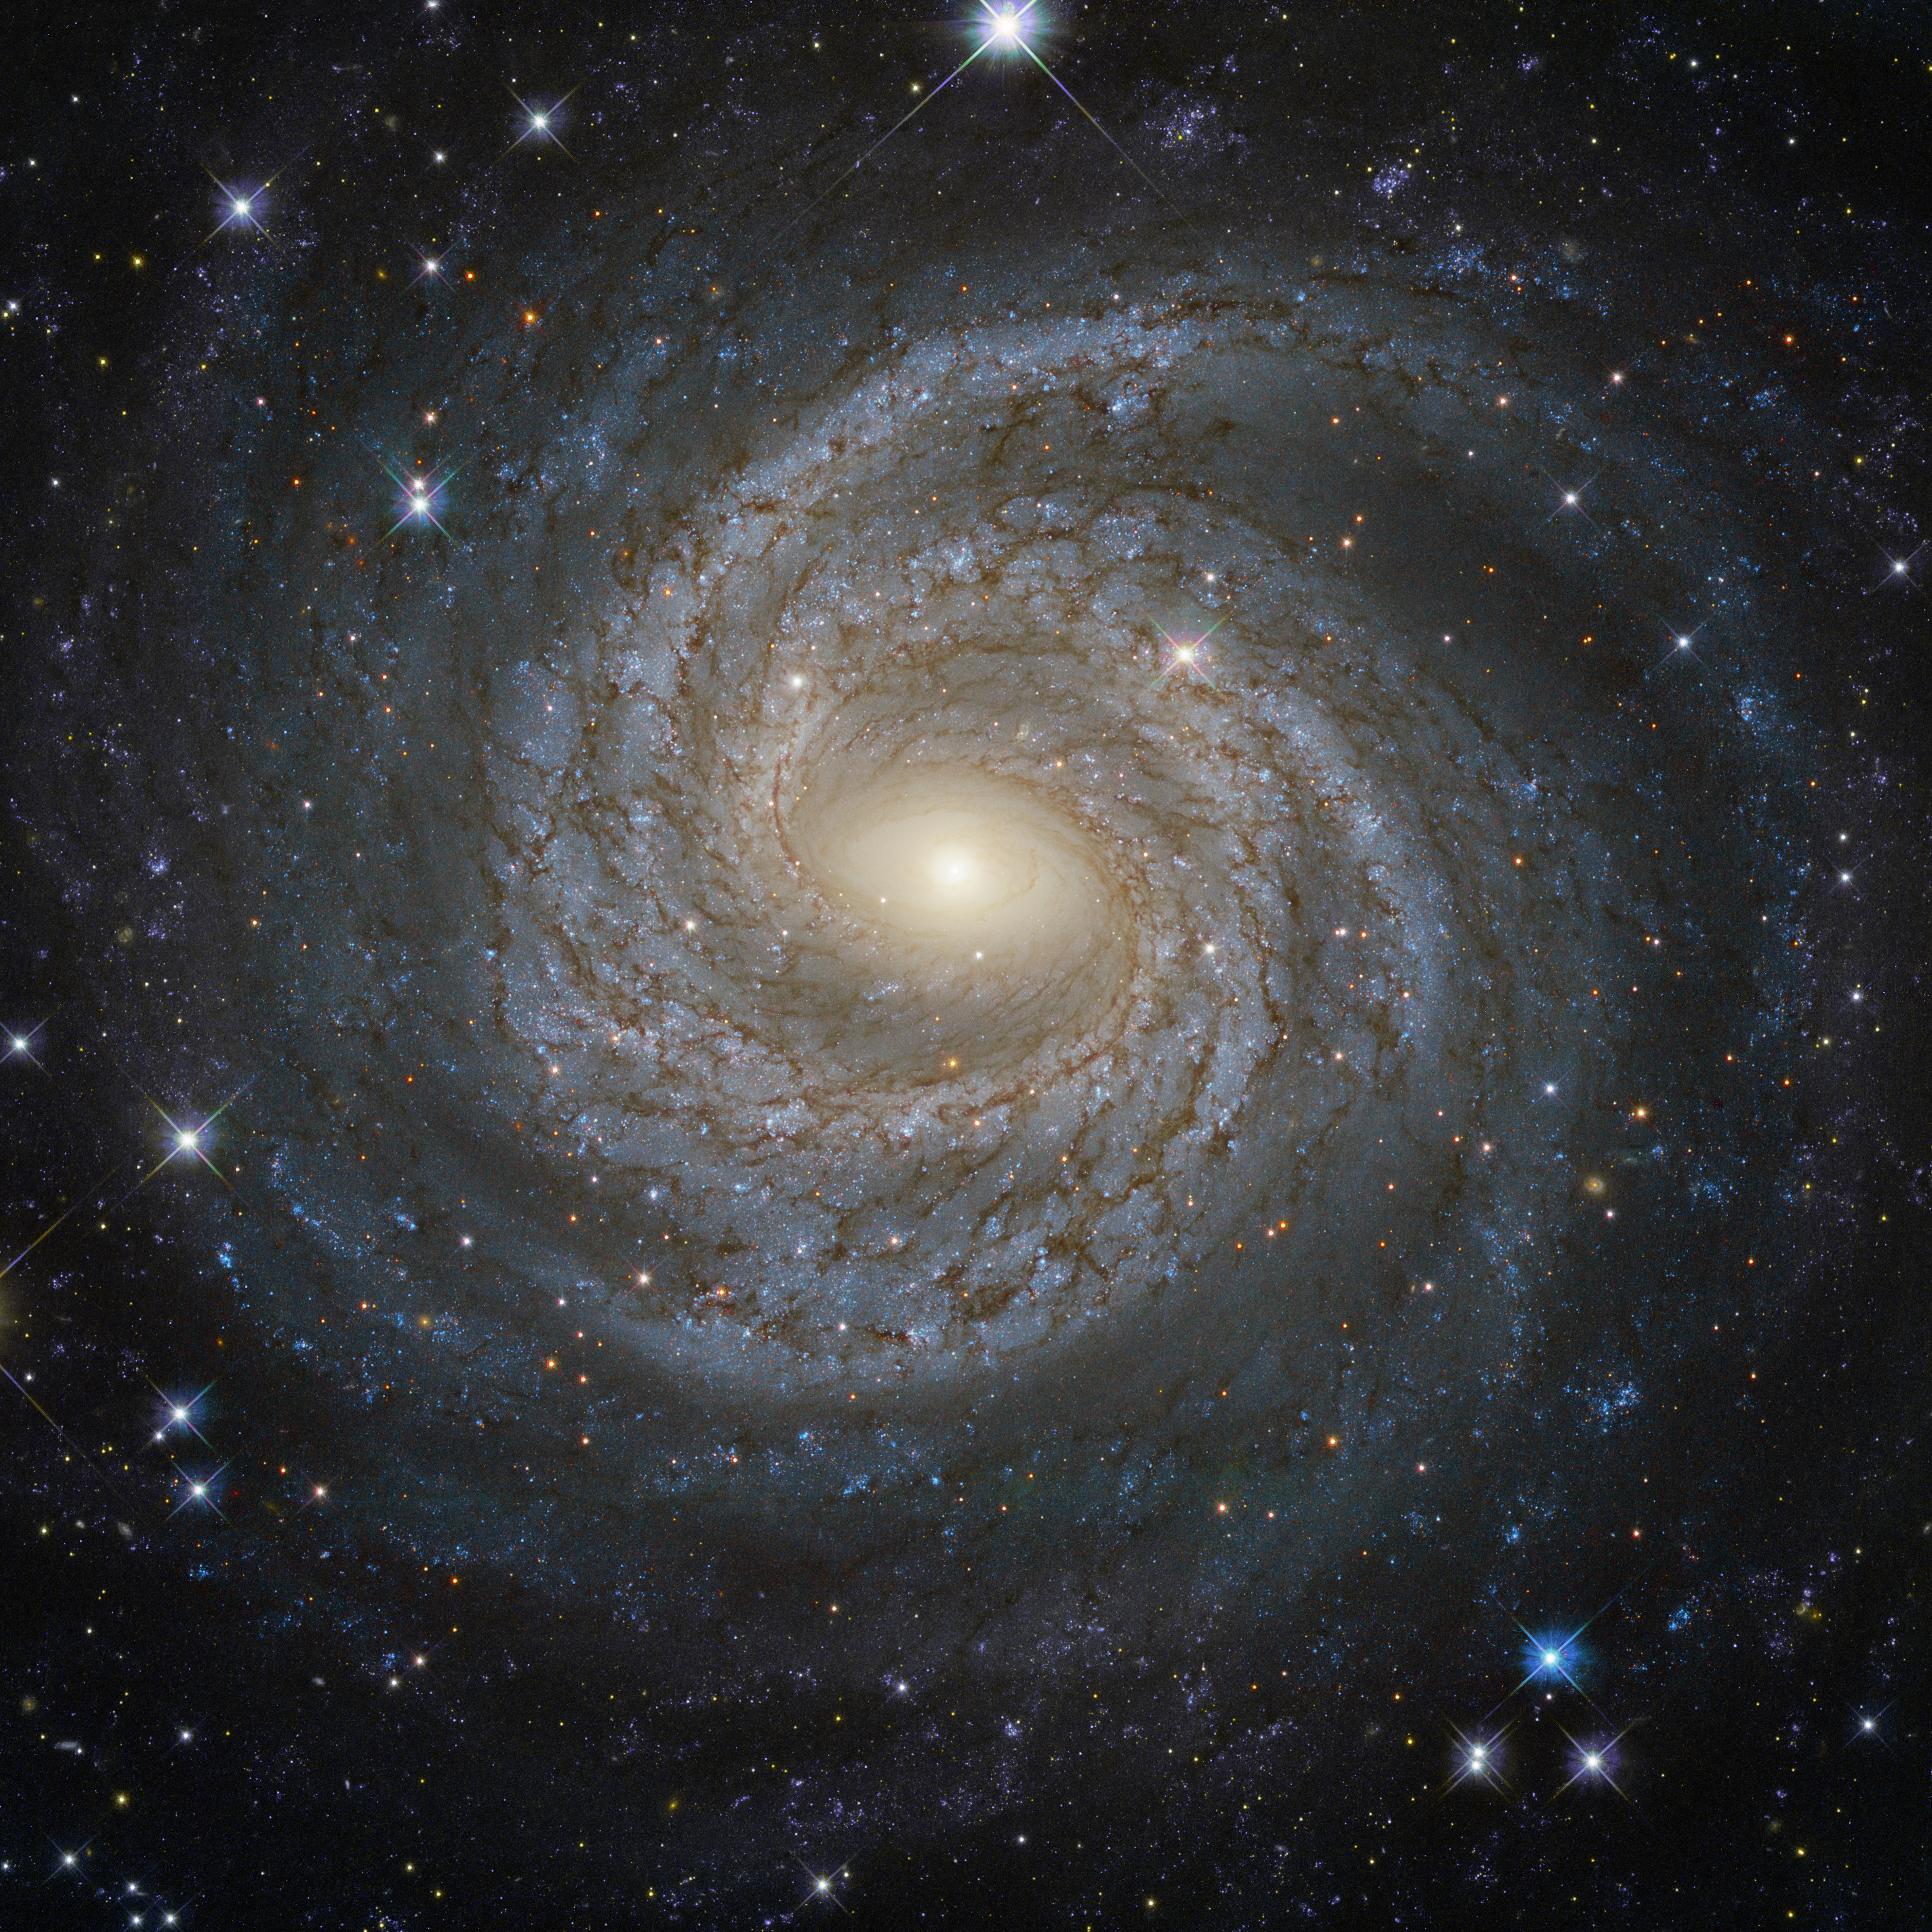

A spiral snowflake

Spiral galaxies together with irregular galaxies make up approximately 60% of the galaxies in the local Universe. However, despite their prevalence, each spiral galaxy is unique — like snowflakes, no two are alike. This is demonstrated by the striking face-on spiral galaxy NGC 6814, whose luminous nucleus and spectacular sweeping arms, rippled with an intricate pattern of dark dust, are captured in this NASA/ESA Hubble Space Telescope image.

NGC 6814 has an extremely bright nucleus, a telltale sign that the galaxy is a Seyfert galaxy. These galaxies have very active centres that can emit strong bursts of radiation. The luminous heart of NGC 6814 is a highly variable source of X-ray radiation, causing scientists to suspect that it hosts a supermassive black hole with a mass about 18 million times that of the Sun.

As NGC 6814 is a very active galaxy, many regions of ionised gas are studded along its spiral arms. In these large clouds of gas, a burst of star formation has recently taken place, forging the brilliant blue stars that are visible scattered throughout the galaxy.

Credit: ESA/Hubble & NASA Acknowledgement: Judy Schmidt (Geckzilla)